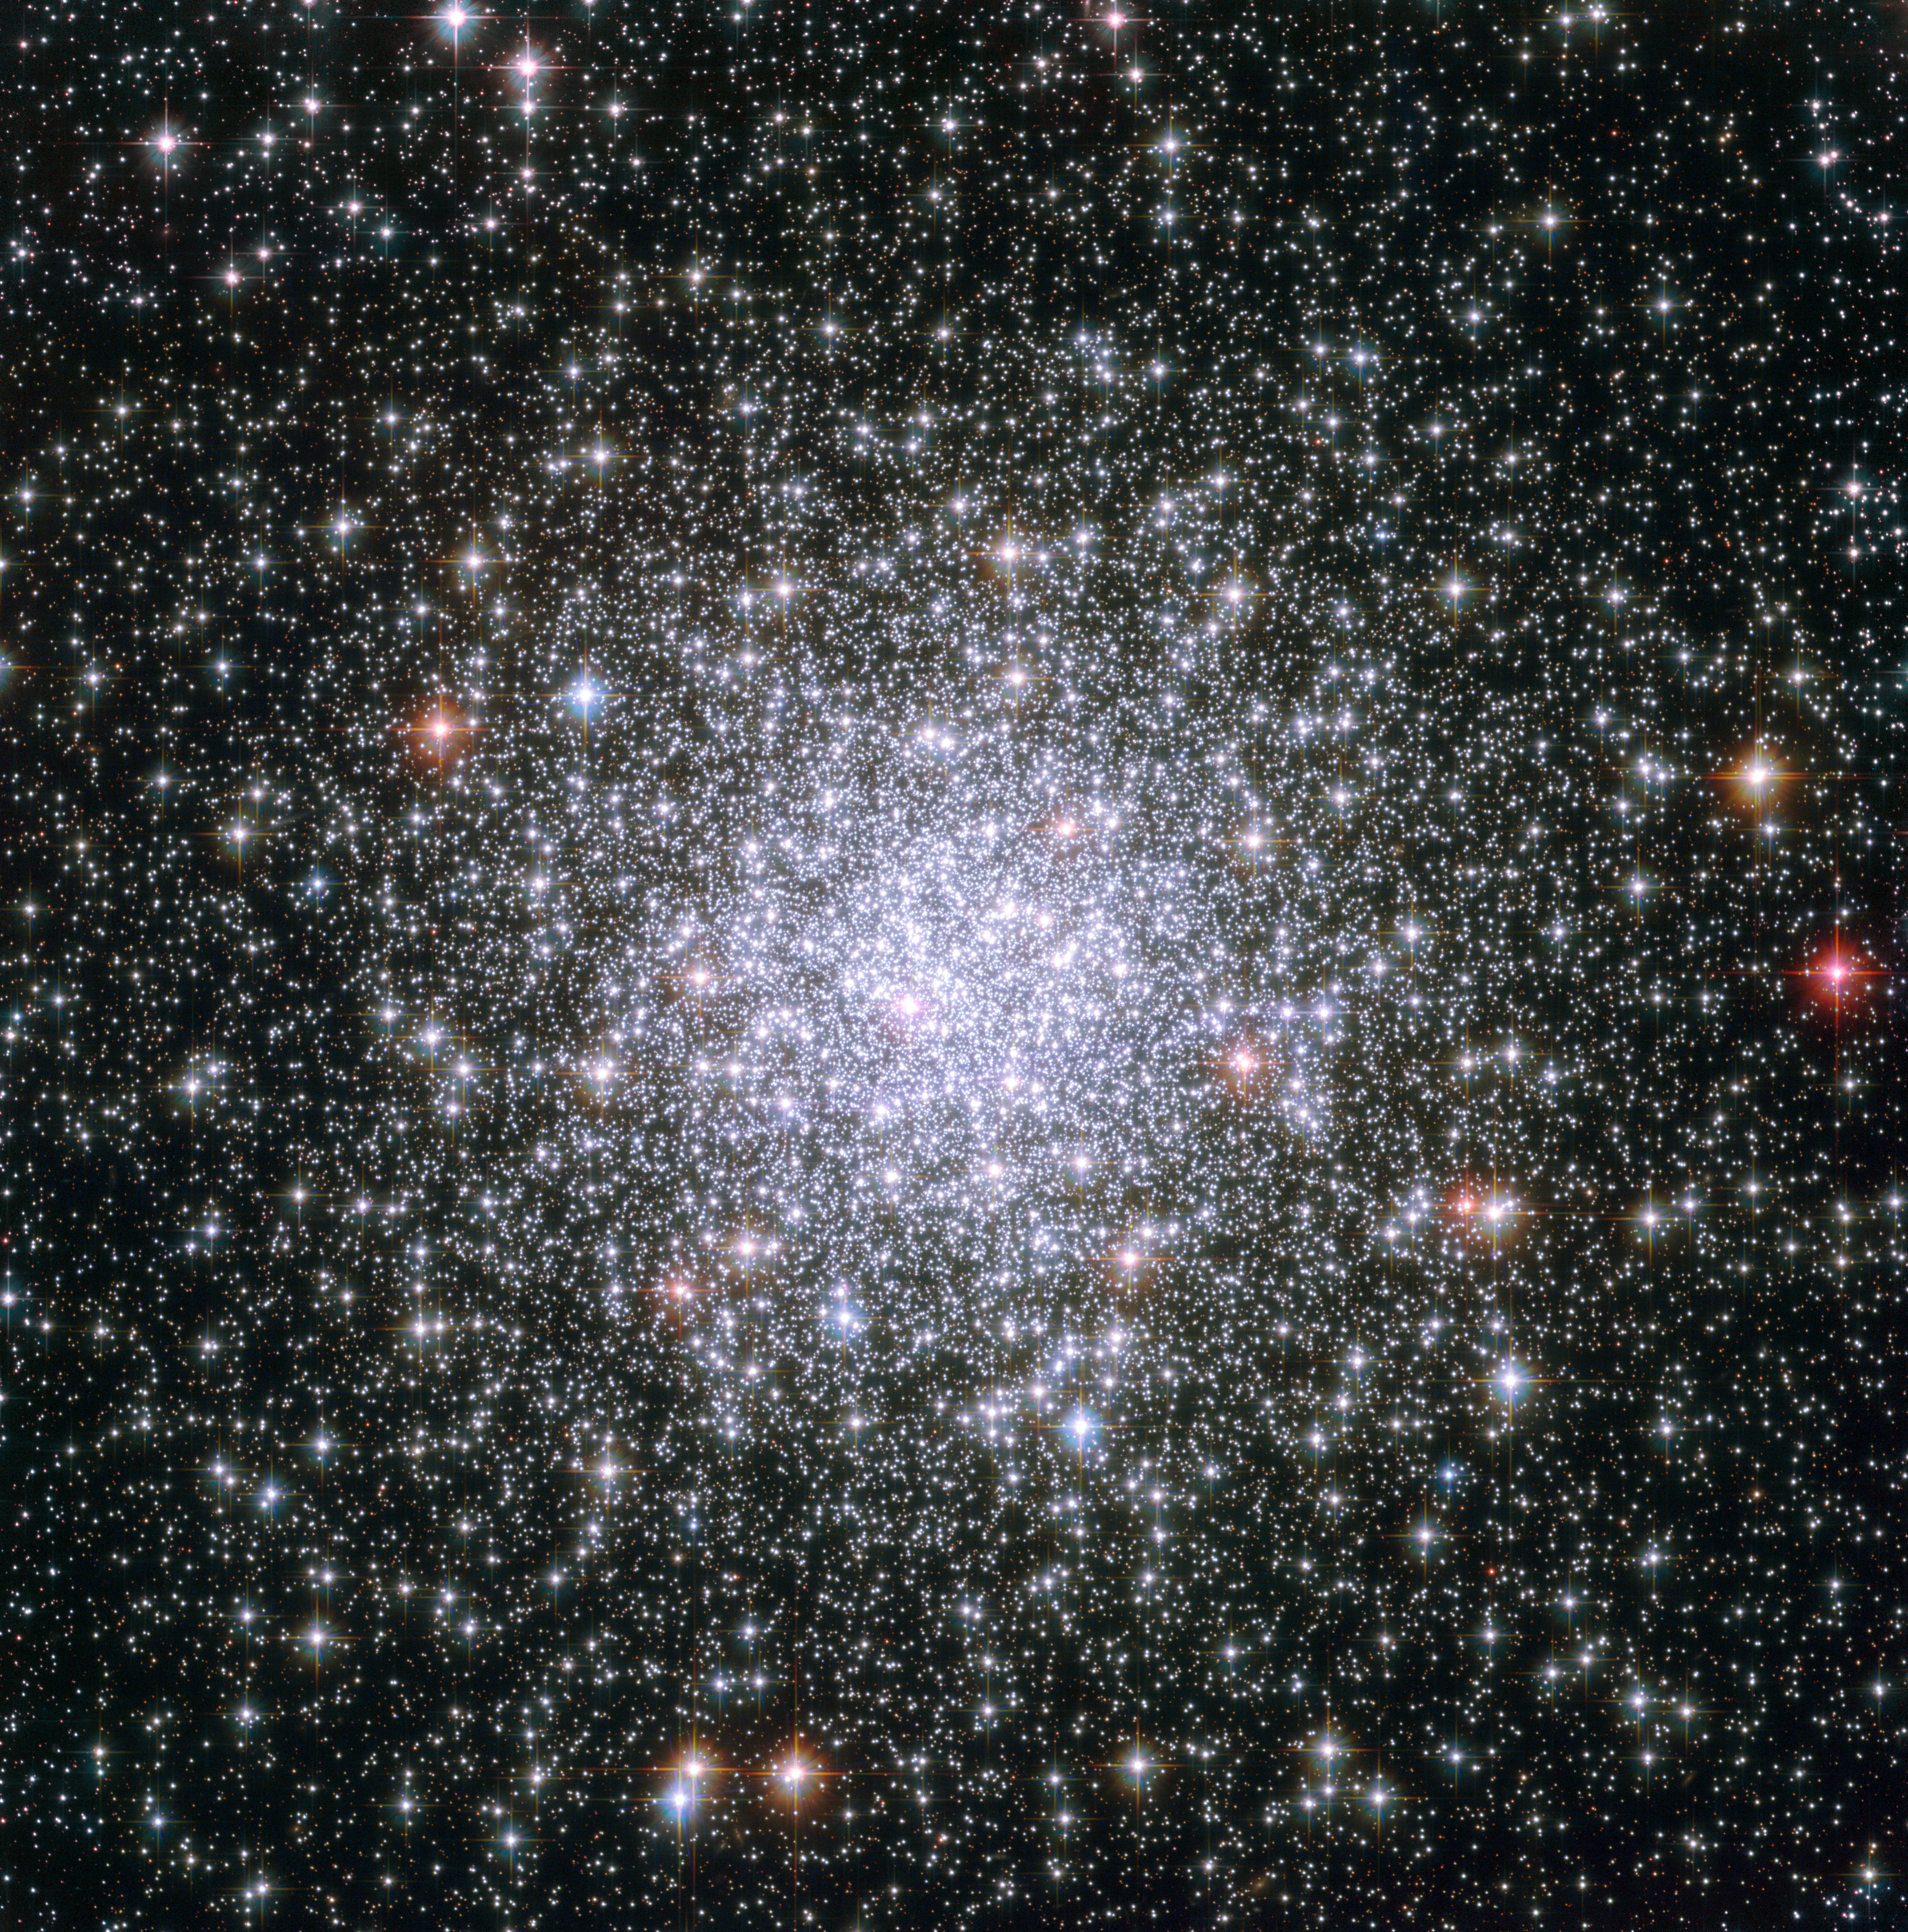

Cosmic riches

This dazzling image shows the globular cluster Messier 69, or M 69 for short, as viewed through the NASA/ESA Hubble Space Telescope. Globular clusters are dense collections of old stars. In this picture, foreground stars look big and golden when set against the backdrop of the thousands of white, silvery stars that make up M 69.

Another aspect of M 69 lends itself to the bejewelled metaphor: As globular clusters go, M 69 is one of the most metal-rich on record. In astronomy, the term “metal” has a specialised meaning: it refers to any element heavier than the two most common elements in our Universe, hydrogen and helium. The nuclear fusion that powers stars created all of the metallic elements in nature, from the calcium in our bones to the carbon in diamonds. Successive generations of stars have built up the metallic abundances we see today.

Because the stars in globular clusters are ancient, their metallic abundances are much lower than more recently formed stars, such as the Sun. Studying the makeup of stars in globular clusters like M 69 has helped astronomers trace back the evolution of the cosmos.

M 69 is located 29 700 light-years away in the constellation Sagittarius (the Archer). The famed French comet hunter Charles Messier added M 69 to his catalogue in 1780. It is also known as NGC 6637.

The image is a combination of exposures taken in visible and near-infrared light by Hubble’s Advanced Camera for Surveys, and covers a field of view of approximately 3.4 by 3.4 arcminutes.

Credit: ESA/Hubble & NASA